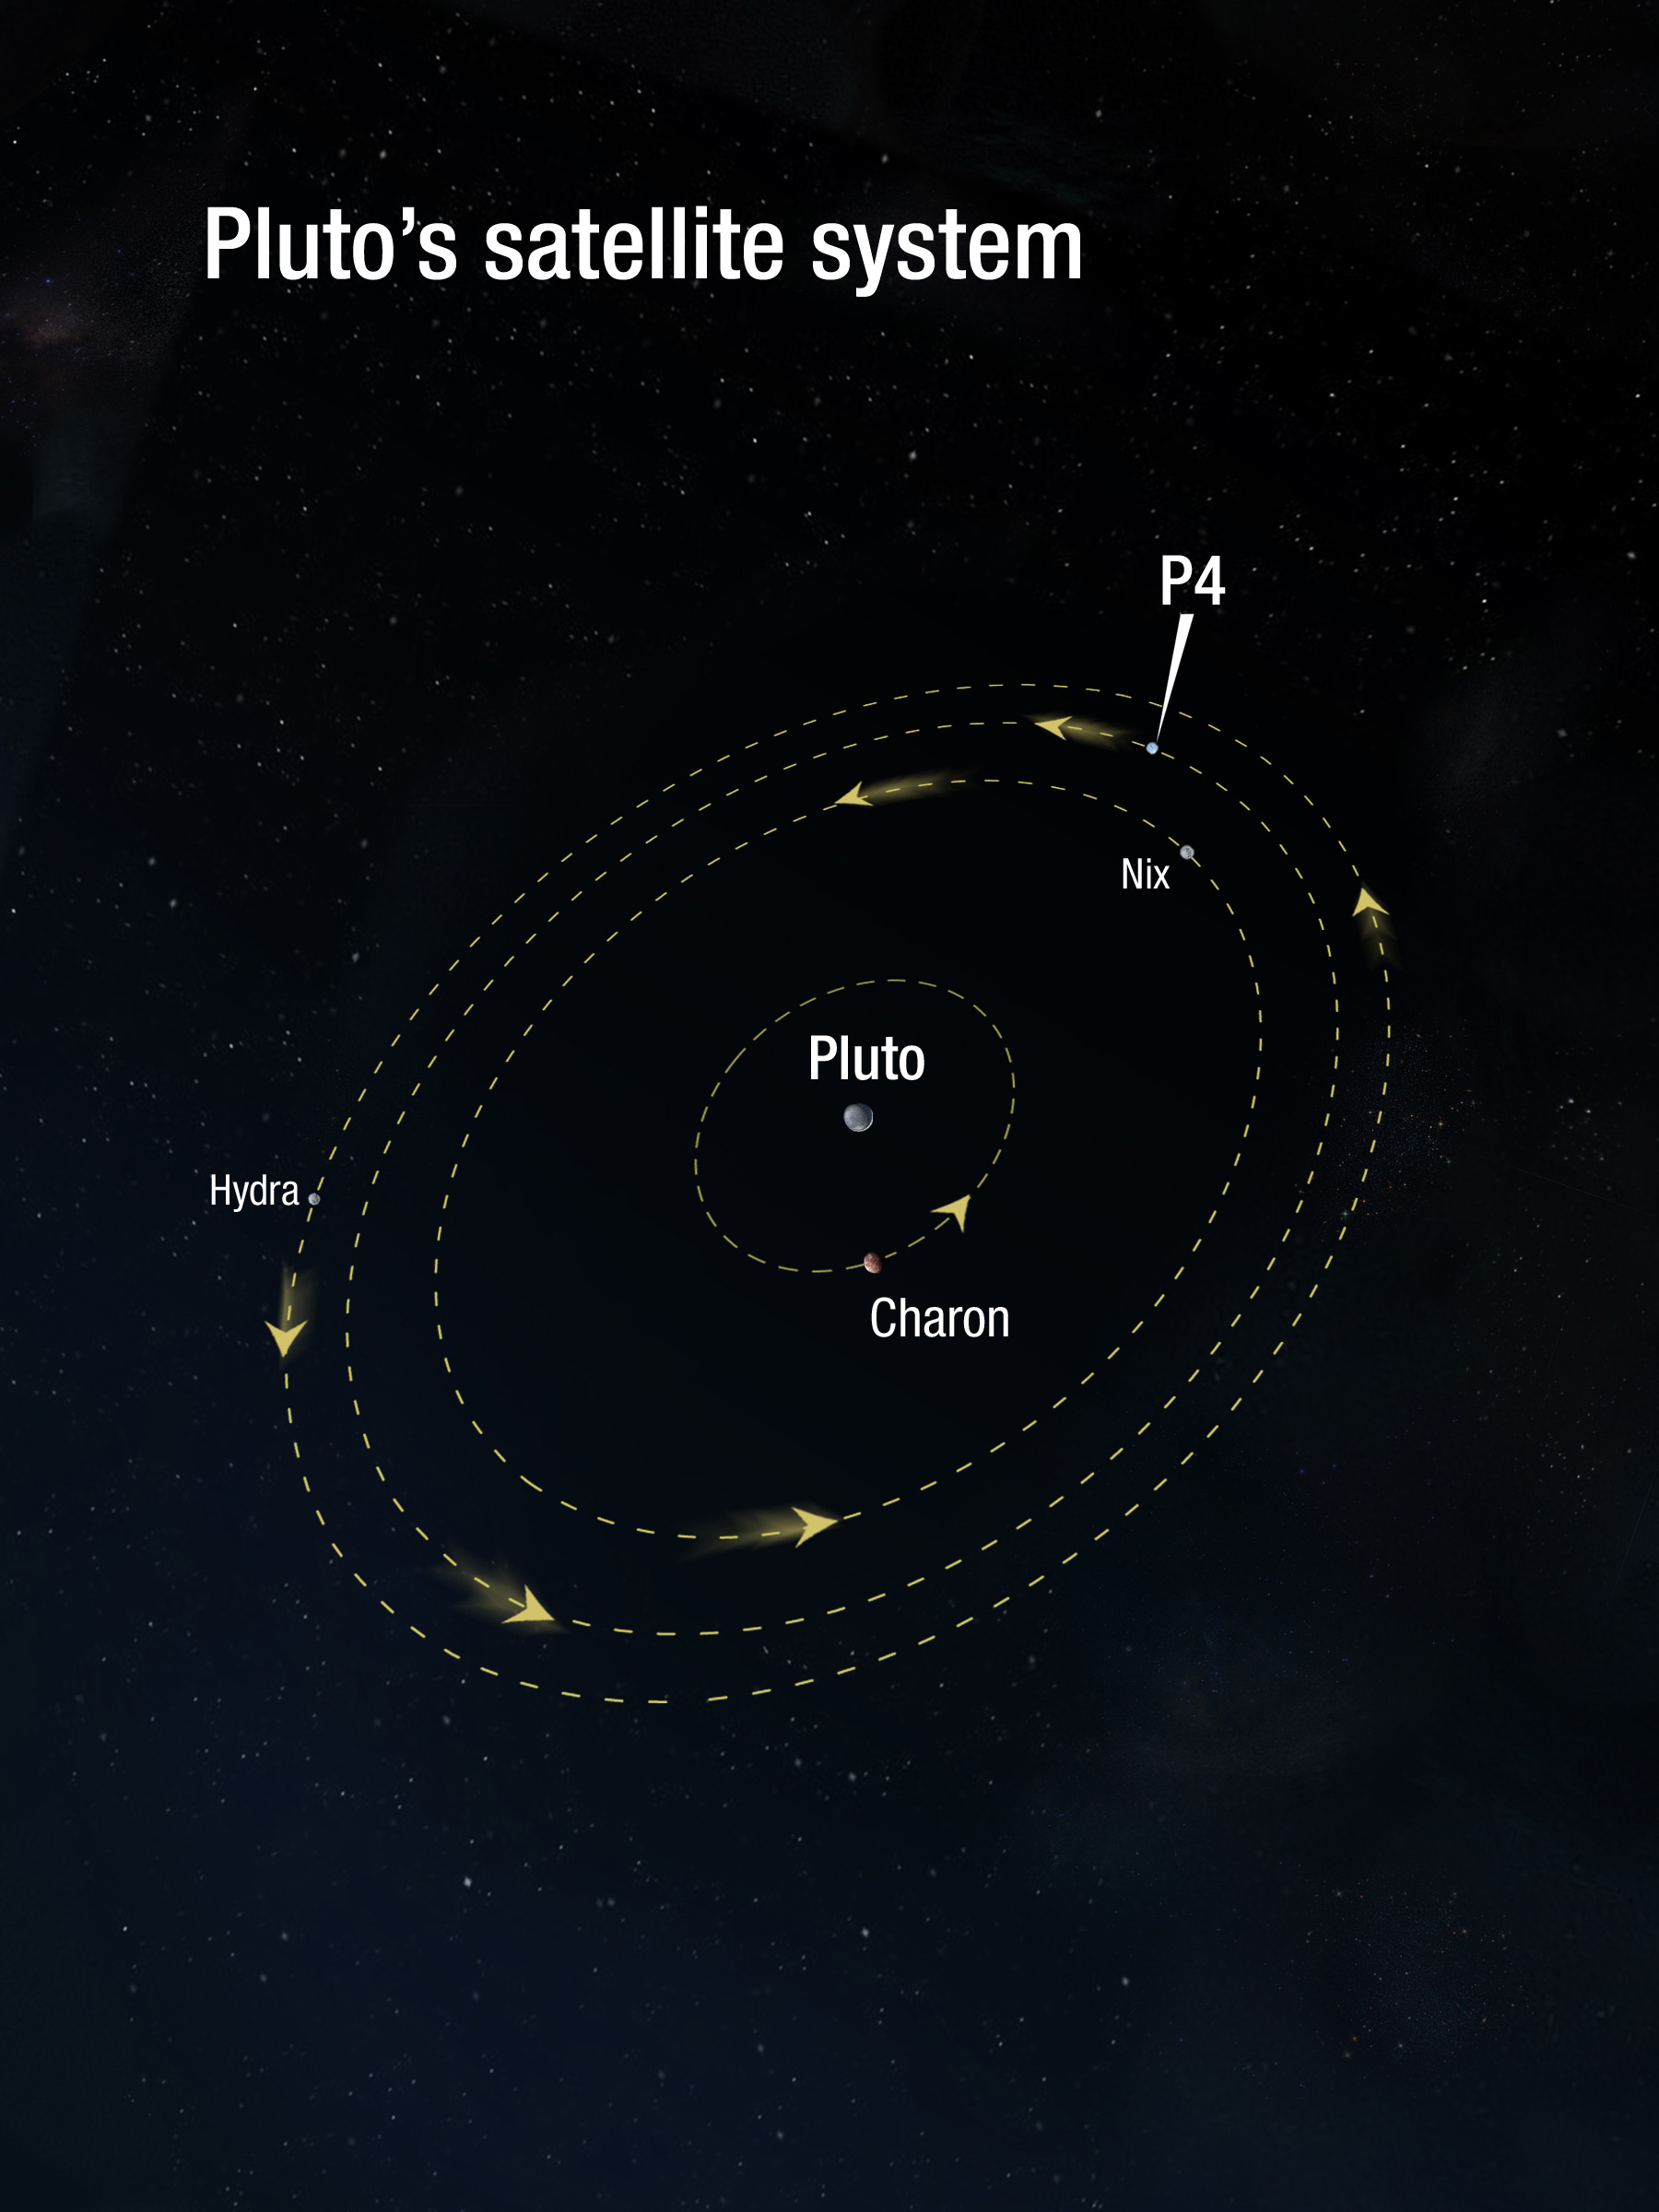

Pluto's satellite system

This illustration shows the relative orbits of Pluto's moons: Charon, Nix, P4, and Hydra. The orbits are nearly circular and tilted to our line of sight, so they appear elongated.

Credit: NASA, ESA, and A. Feild (STScI)